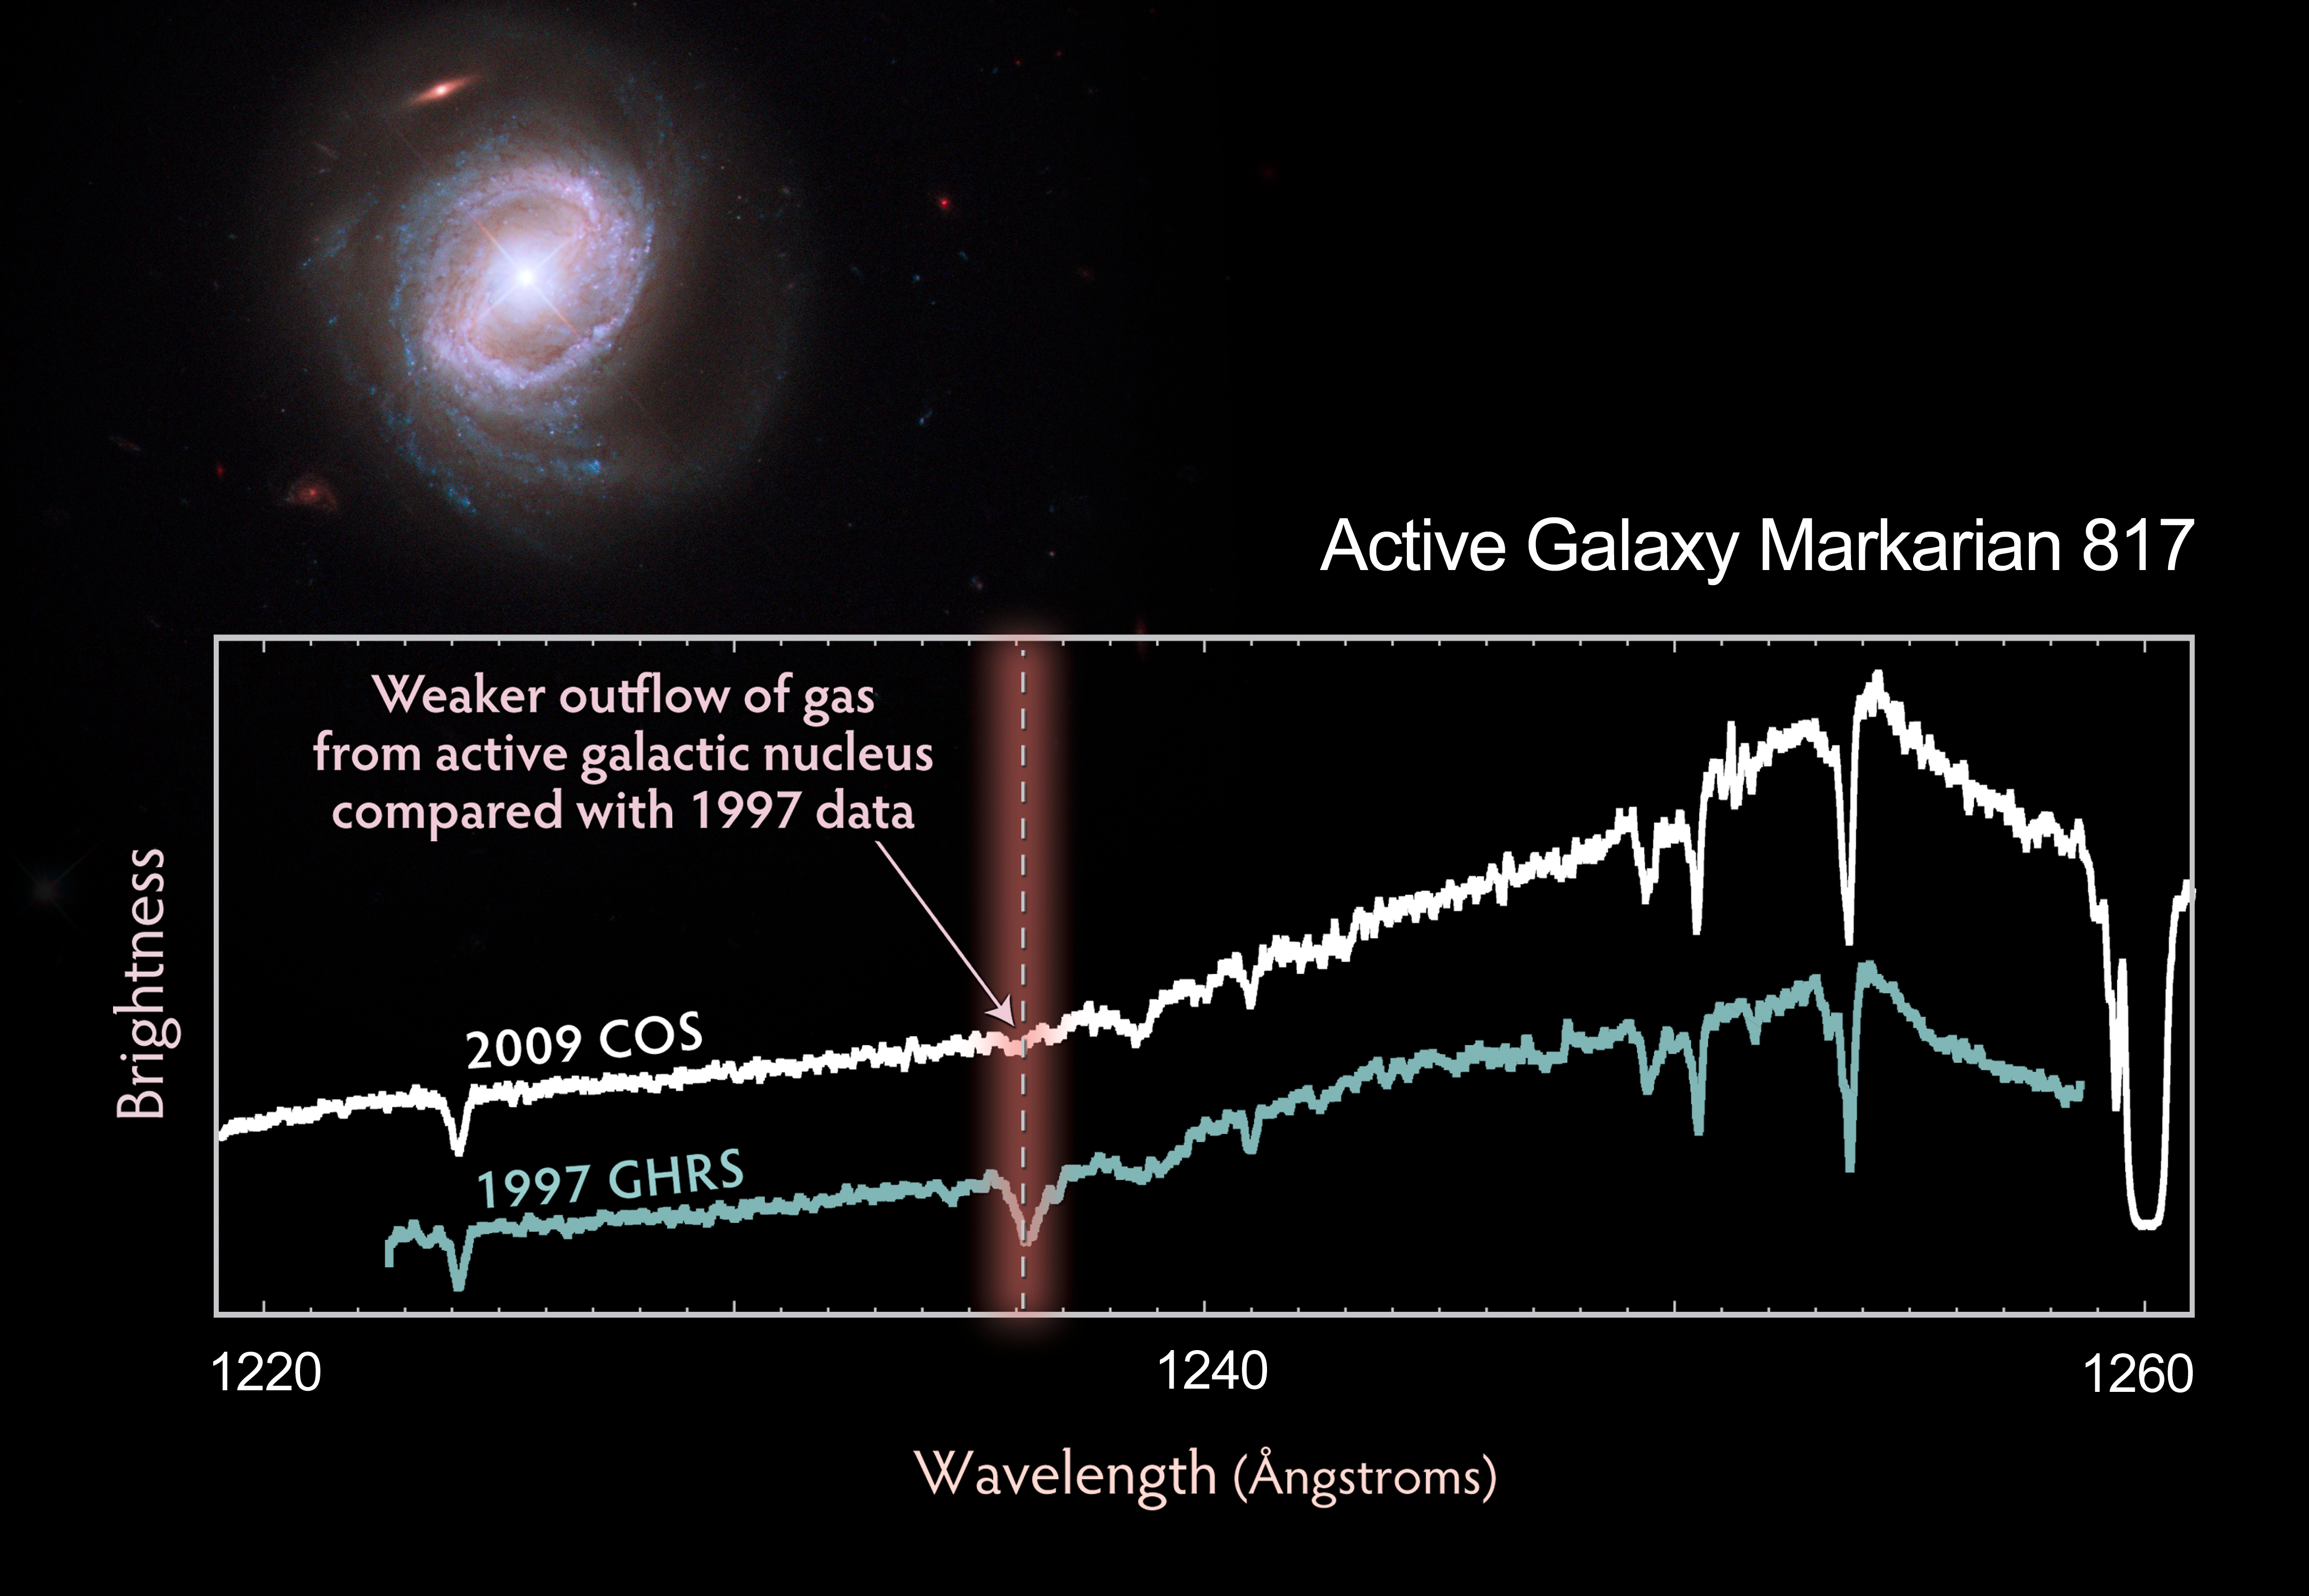

Composite image of Markarian 817 with COS spectrum

Rings of brilliant blue stars encircle the bright, active core of this spiral galaxy, whose monster black hole is blasting material into space at over 14 million kilometres per hour. Viewed nearly face-on, the galaxy, called Markarian 817, shows intense star-forming regions and dark bands of interstellar dust along its spiral arms.

Observations by the new Cosmic Origins Spectrograph (COS) aboard the NASA/ESA Hubble Space Telescope captured the powerful outflow of material from this galaxy.

The COS spectrum of Markarian 817 highlights the outflow's dynamic nature. A gas cloud containing hydrogen that was detected in Hubble data taken in 1997 does not appear in the COS observation because the cloud has apparently been driven out by an outflow of material from the galaxy.

This discharge is being powered by a huge disc of matter encircling the supermassive black hole, which is 40 million times more massive than our Sun. The disc is driving the material out of the galaxy through powerful winds, produced by streams of charged particles. Some of the outflow rains back onto the galaxy. The rest settles into the intergalactic gas.

Astronomers want to know how much of the outflow lands in the galaxy and how much escapes into intergalactic space. To achieve this, they need high-quality spectroscopic observations to detect the signatures of the outflowing material, which includes carbon, nitrogen and oxygen. This will allow them to determine the composition, location and dynamics of the winds that distribute the material.

Markarian 817 is 430 million light-years away in the northern constellation of Draco. COS observed the galaxy on 4 August 2009, using its far-ultraviolet detector to distinguish the outflow from the galaxy’s core. NASA astronauts installed COS during Servicing Mission 4 in May to upgrade and repair the 19-year-old Hubble.

The Hubble image was taken with the Wide Field Camera 3 on 2 August 2009. The composite image was made by using filters that isolate light from the blue, green and infrared portions of the spectrum, as well as emission from glowing hydrogen.

The Hubble observations are part of the Hubble Servicing Mission 4 Early Release Observations.

Credit: NASA, ESA and the Hubble SM4 ERO Team